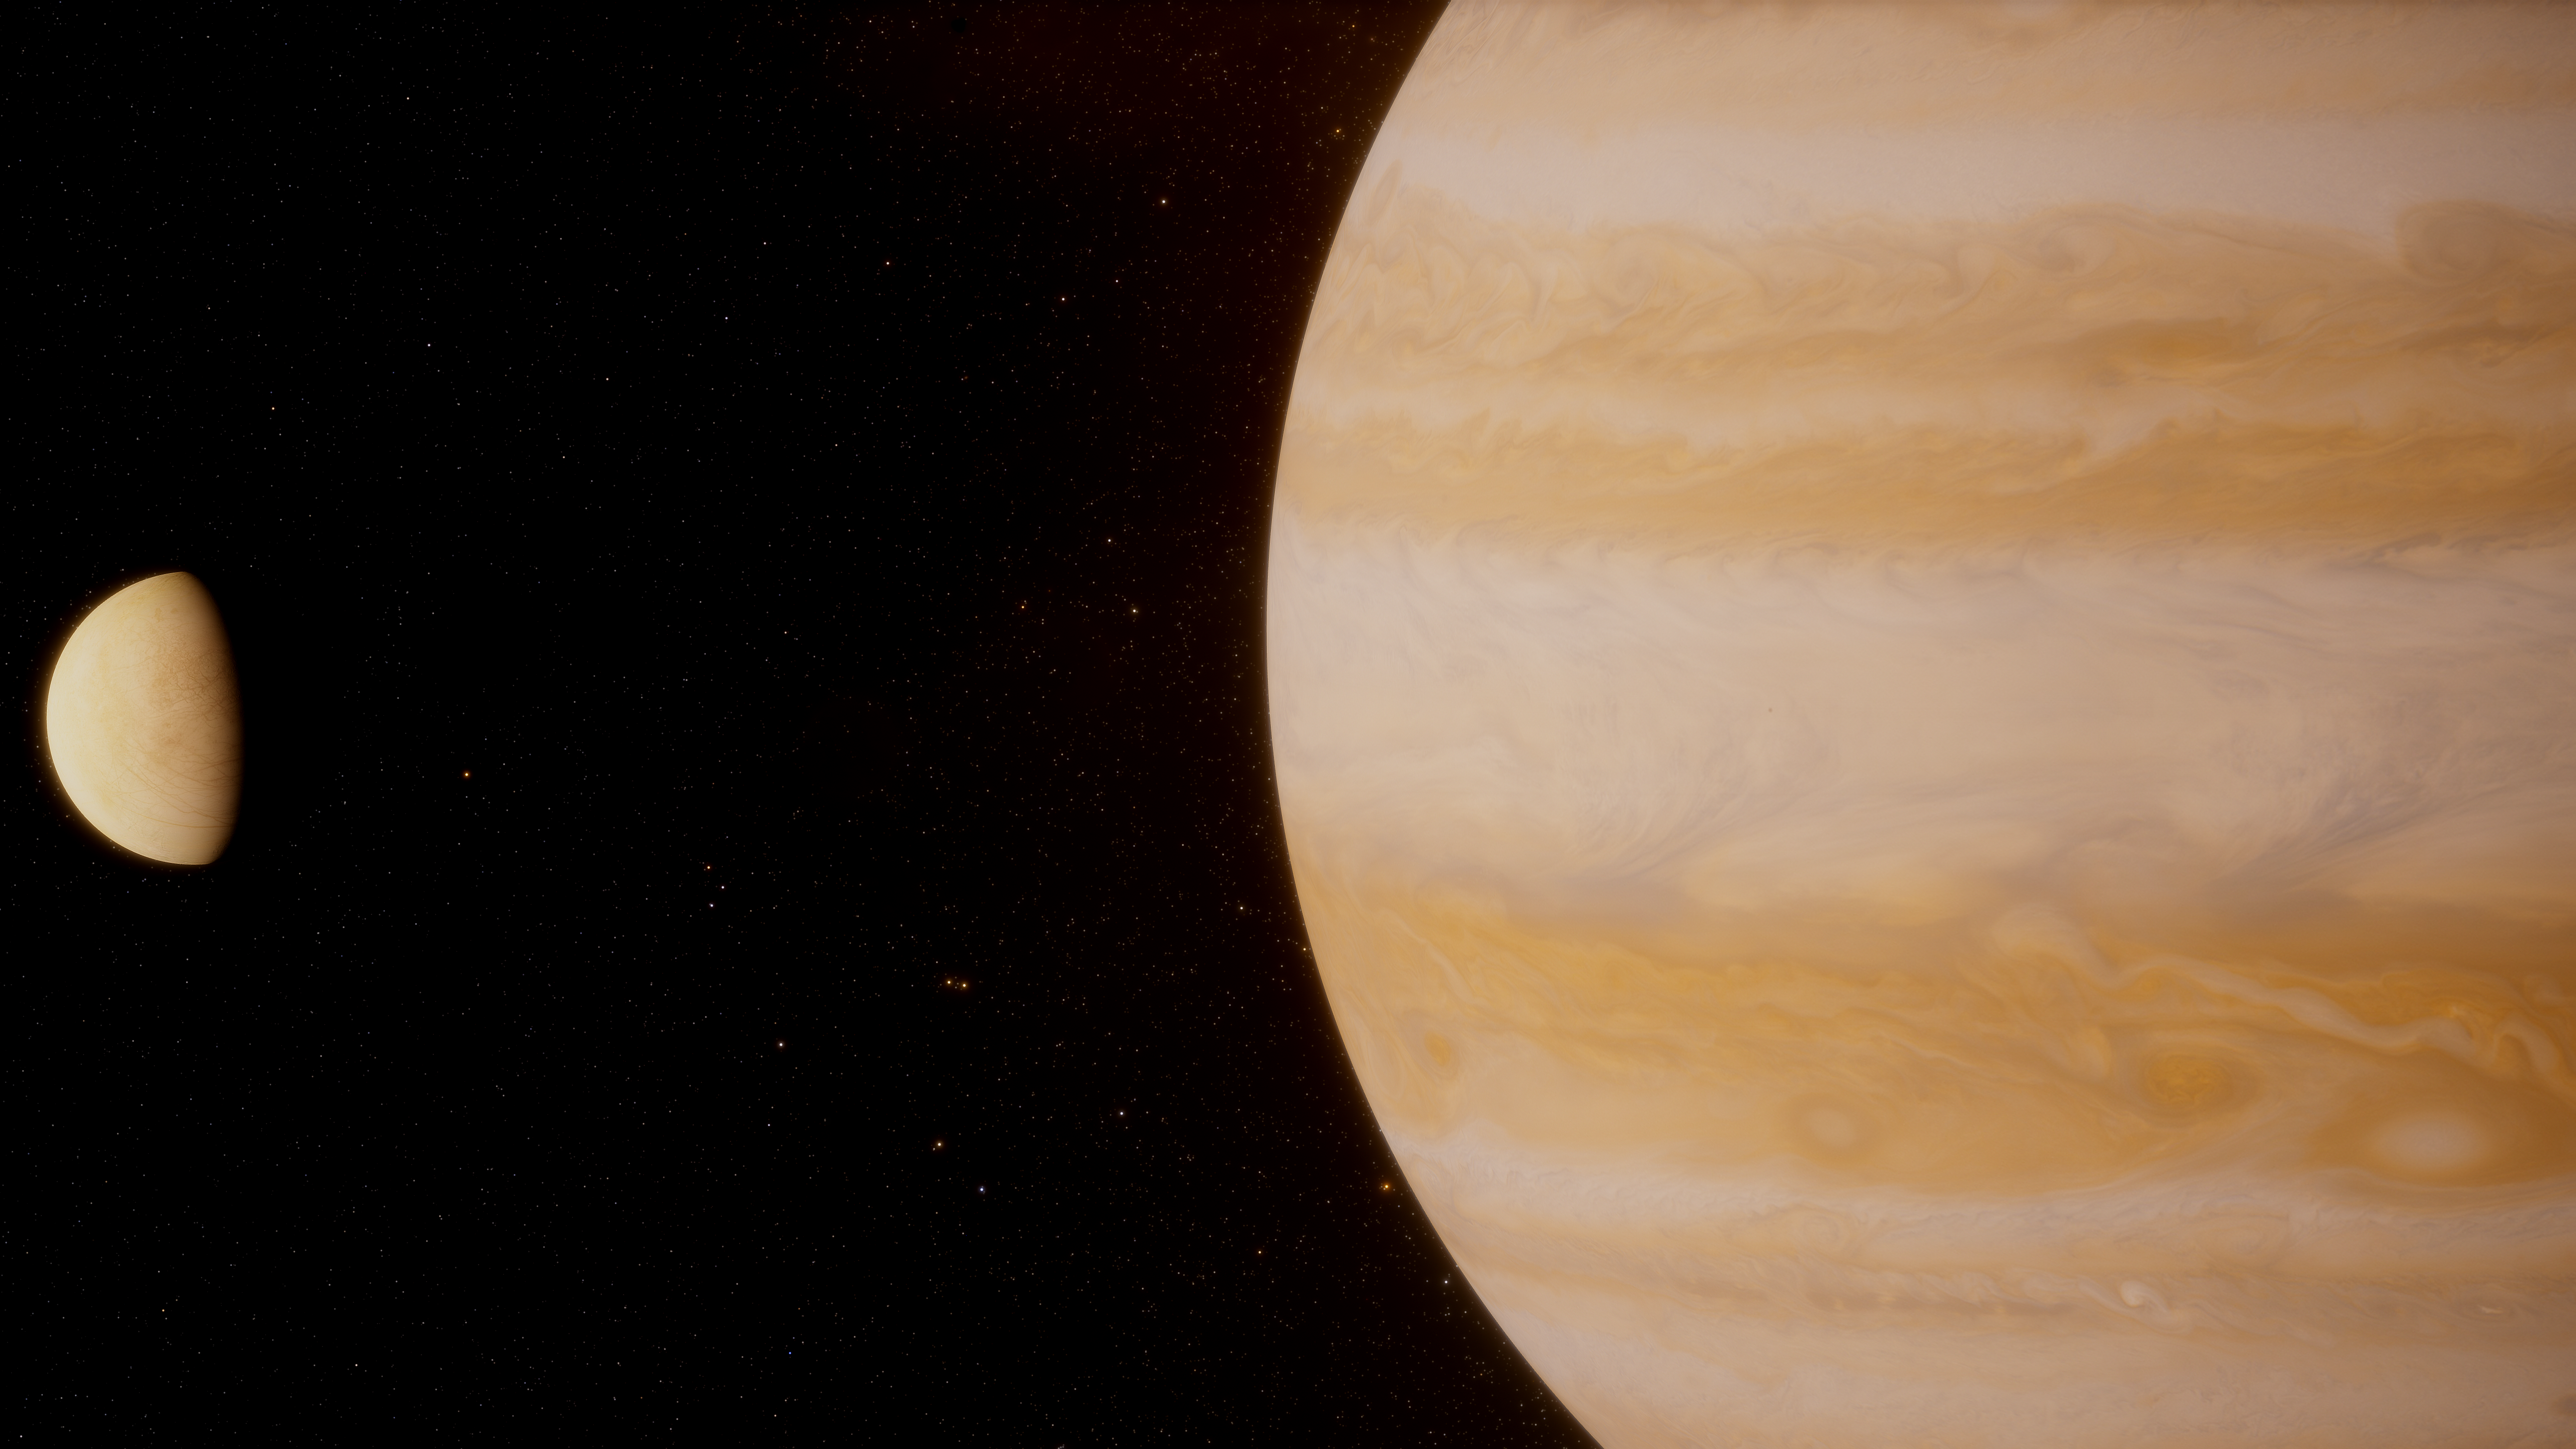

Artist’s Impression of Jupiter and Europa

Observations by the NASA/ESA Hubble Space Telescope recently revealed water vapour in the atmosphere of Ganymede, one of Jupiter’s moons. A new analysis of archival images and spectra has now revealed that water vapour is also present in the atmosphere of Jupter’s icy moon Europa. The analysis found that a water vapour atmosphere is present only on one hemisphere of the moon. This result advances our understanding of the atmospheric structure of icy moons, and helps lay the groundwork for upcoming science missions which will explore Jupiter’s icy moons.

Credit: ESA/Hubble, J. da Silva